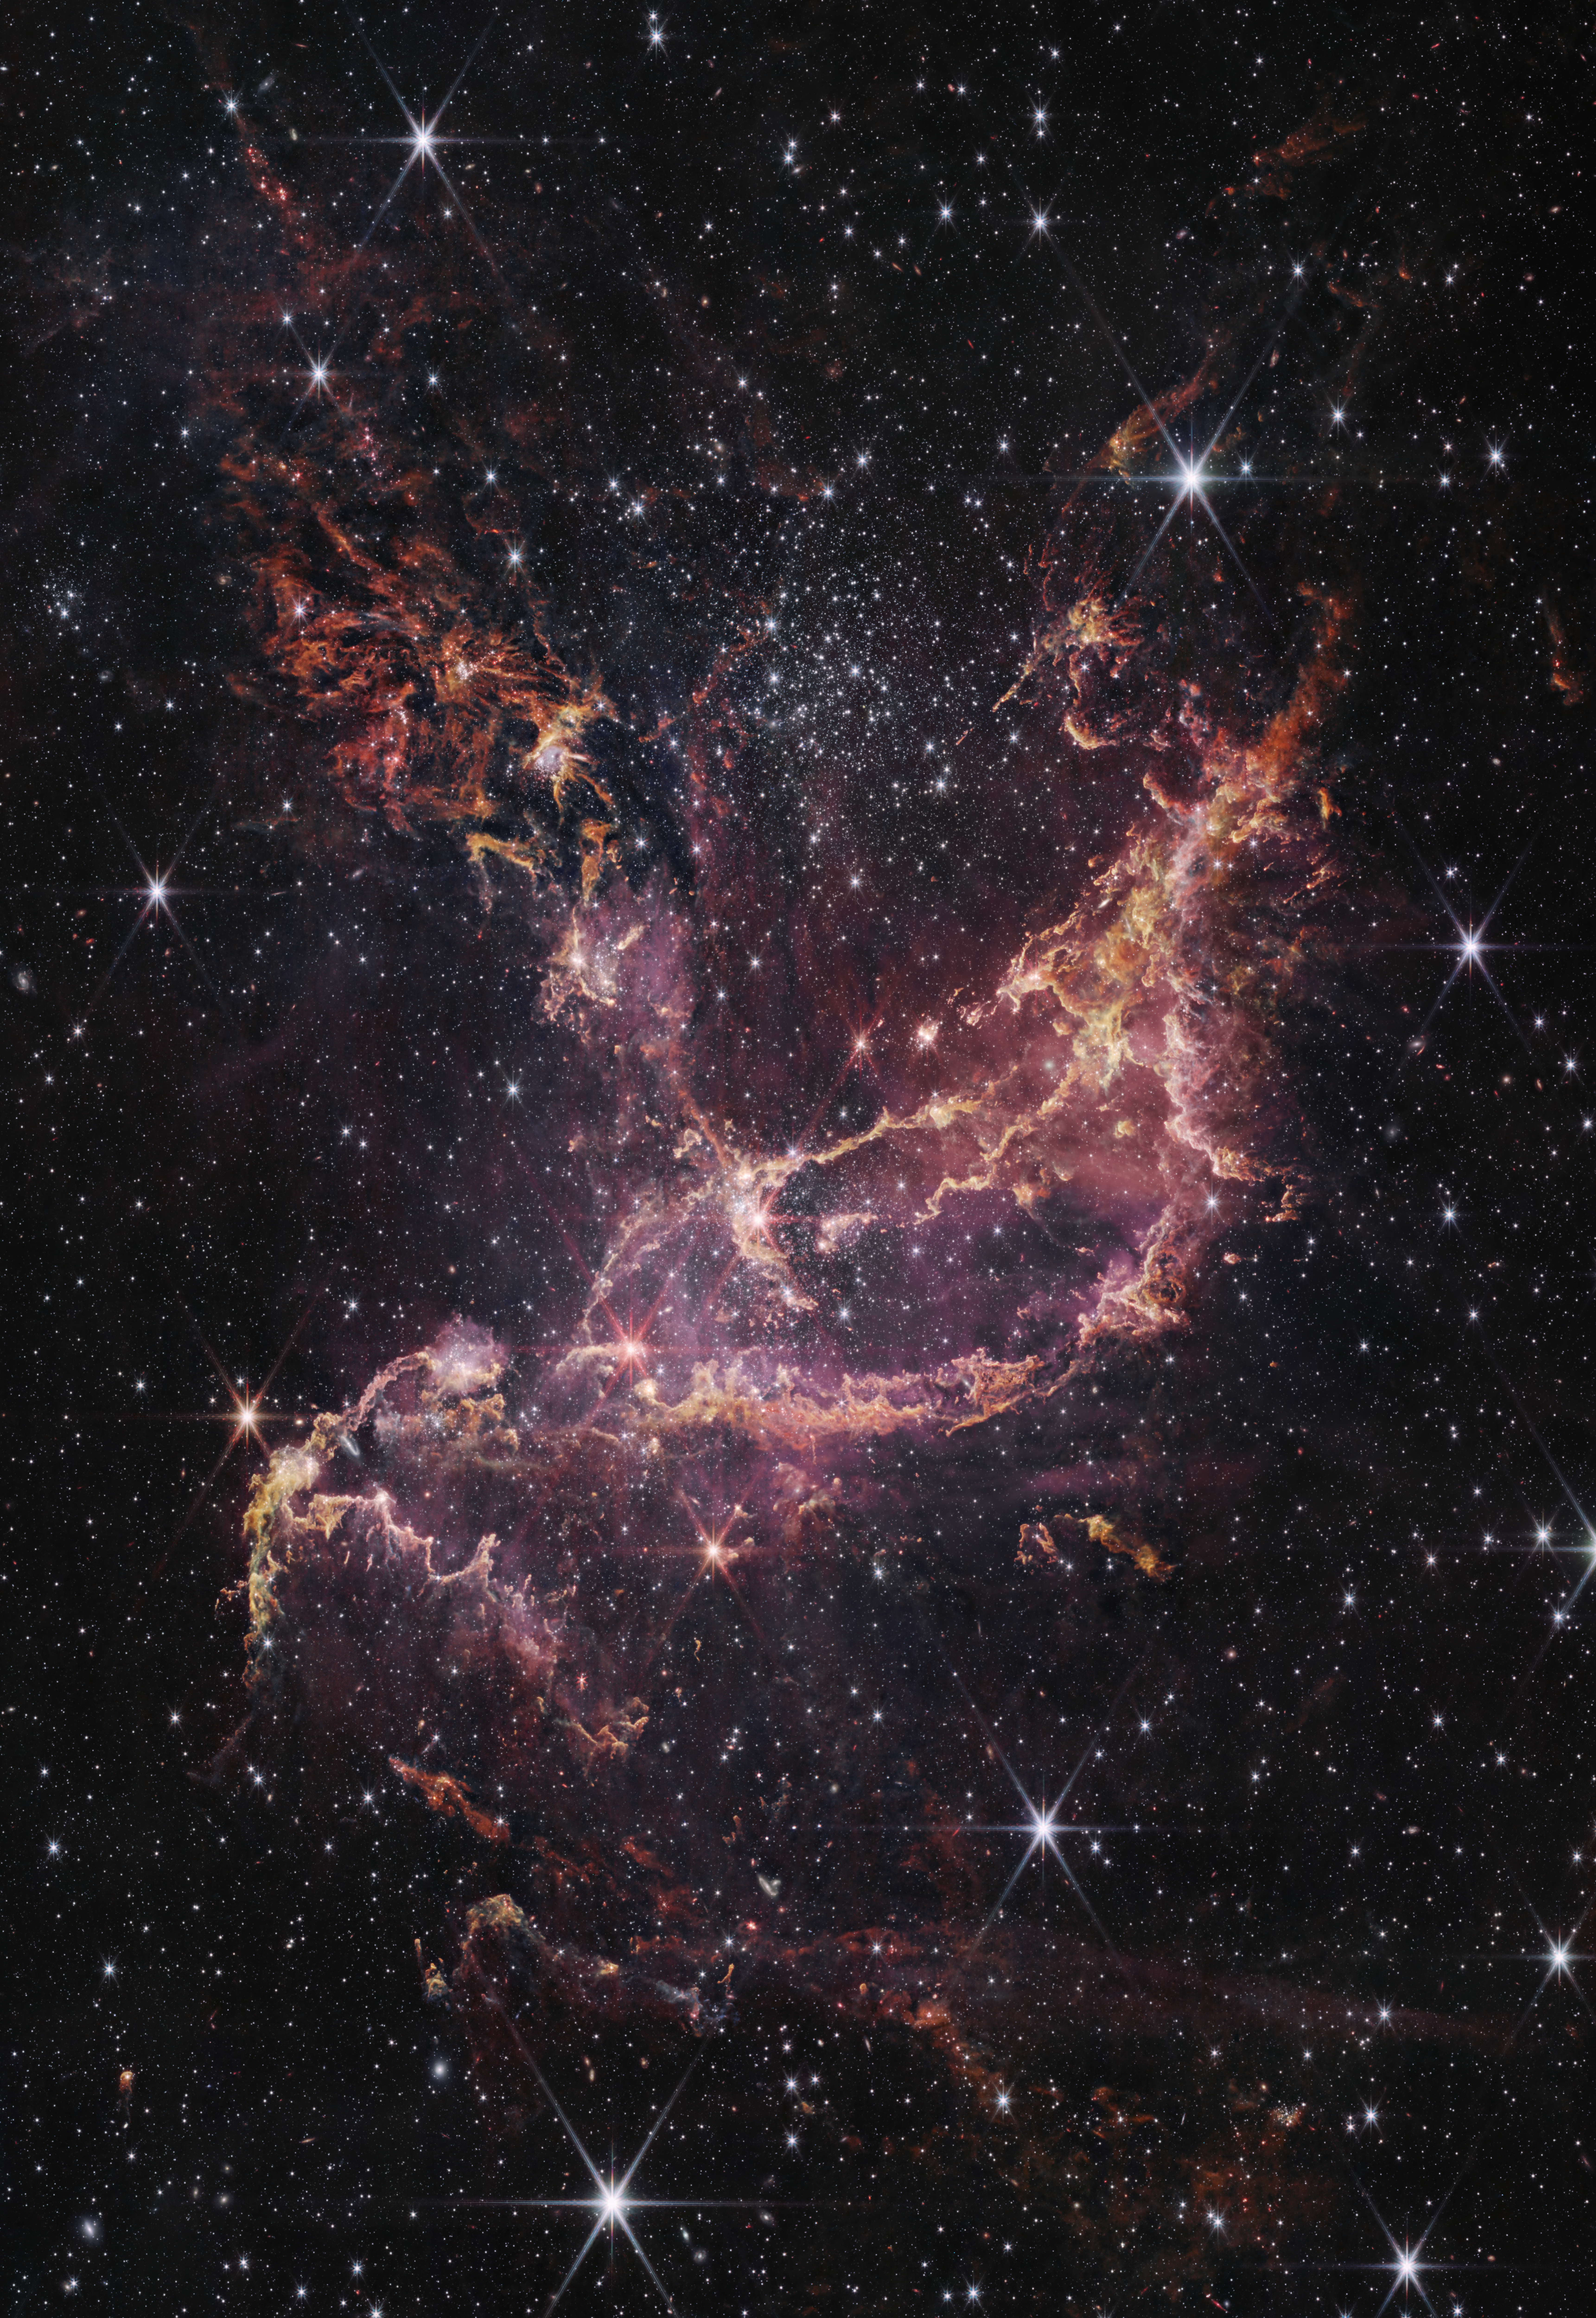

Webb Inspects NGC 346 (NIRCam Image)

This image features NGC 346, one of the most dynamic star-forming regions in nearby galaxies, as seen by the NASA/ESA/CSA James Webb Space Telescope.

NCG 346 is located in the Small Magellanic Cloud (SMC), a dwarf galaxy close to our Milky Way.

Credit: NASA, ESA, CSA, STScI, A. Pagan (STScI)